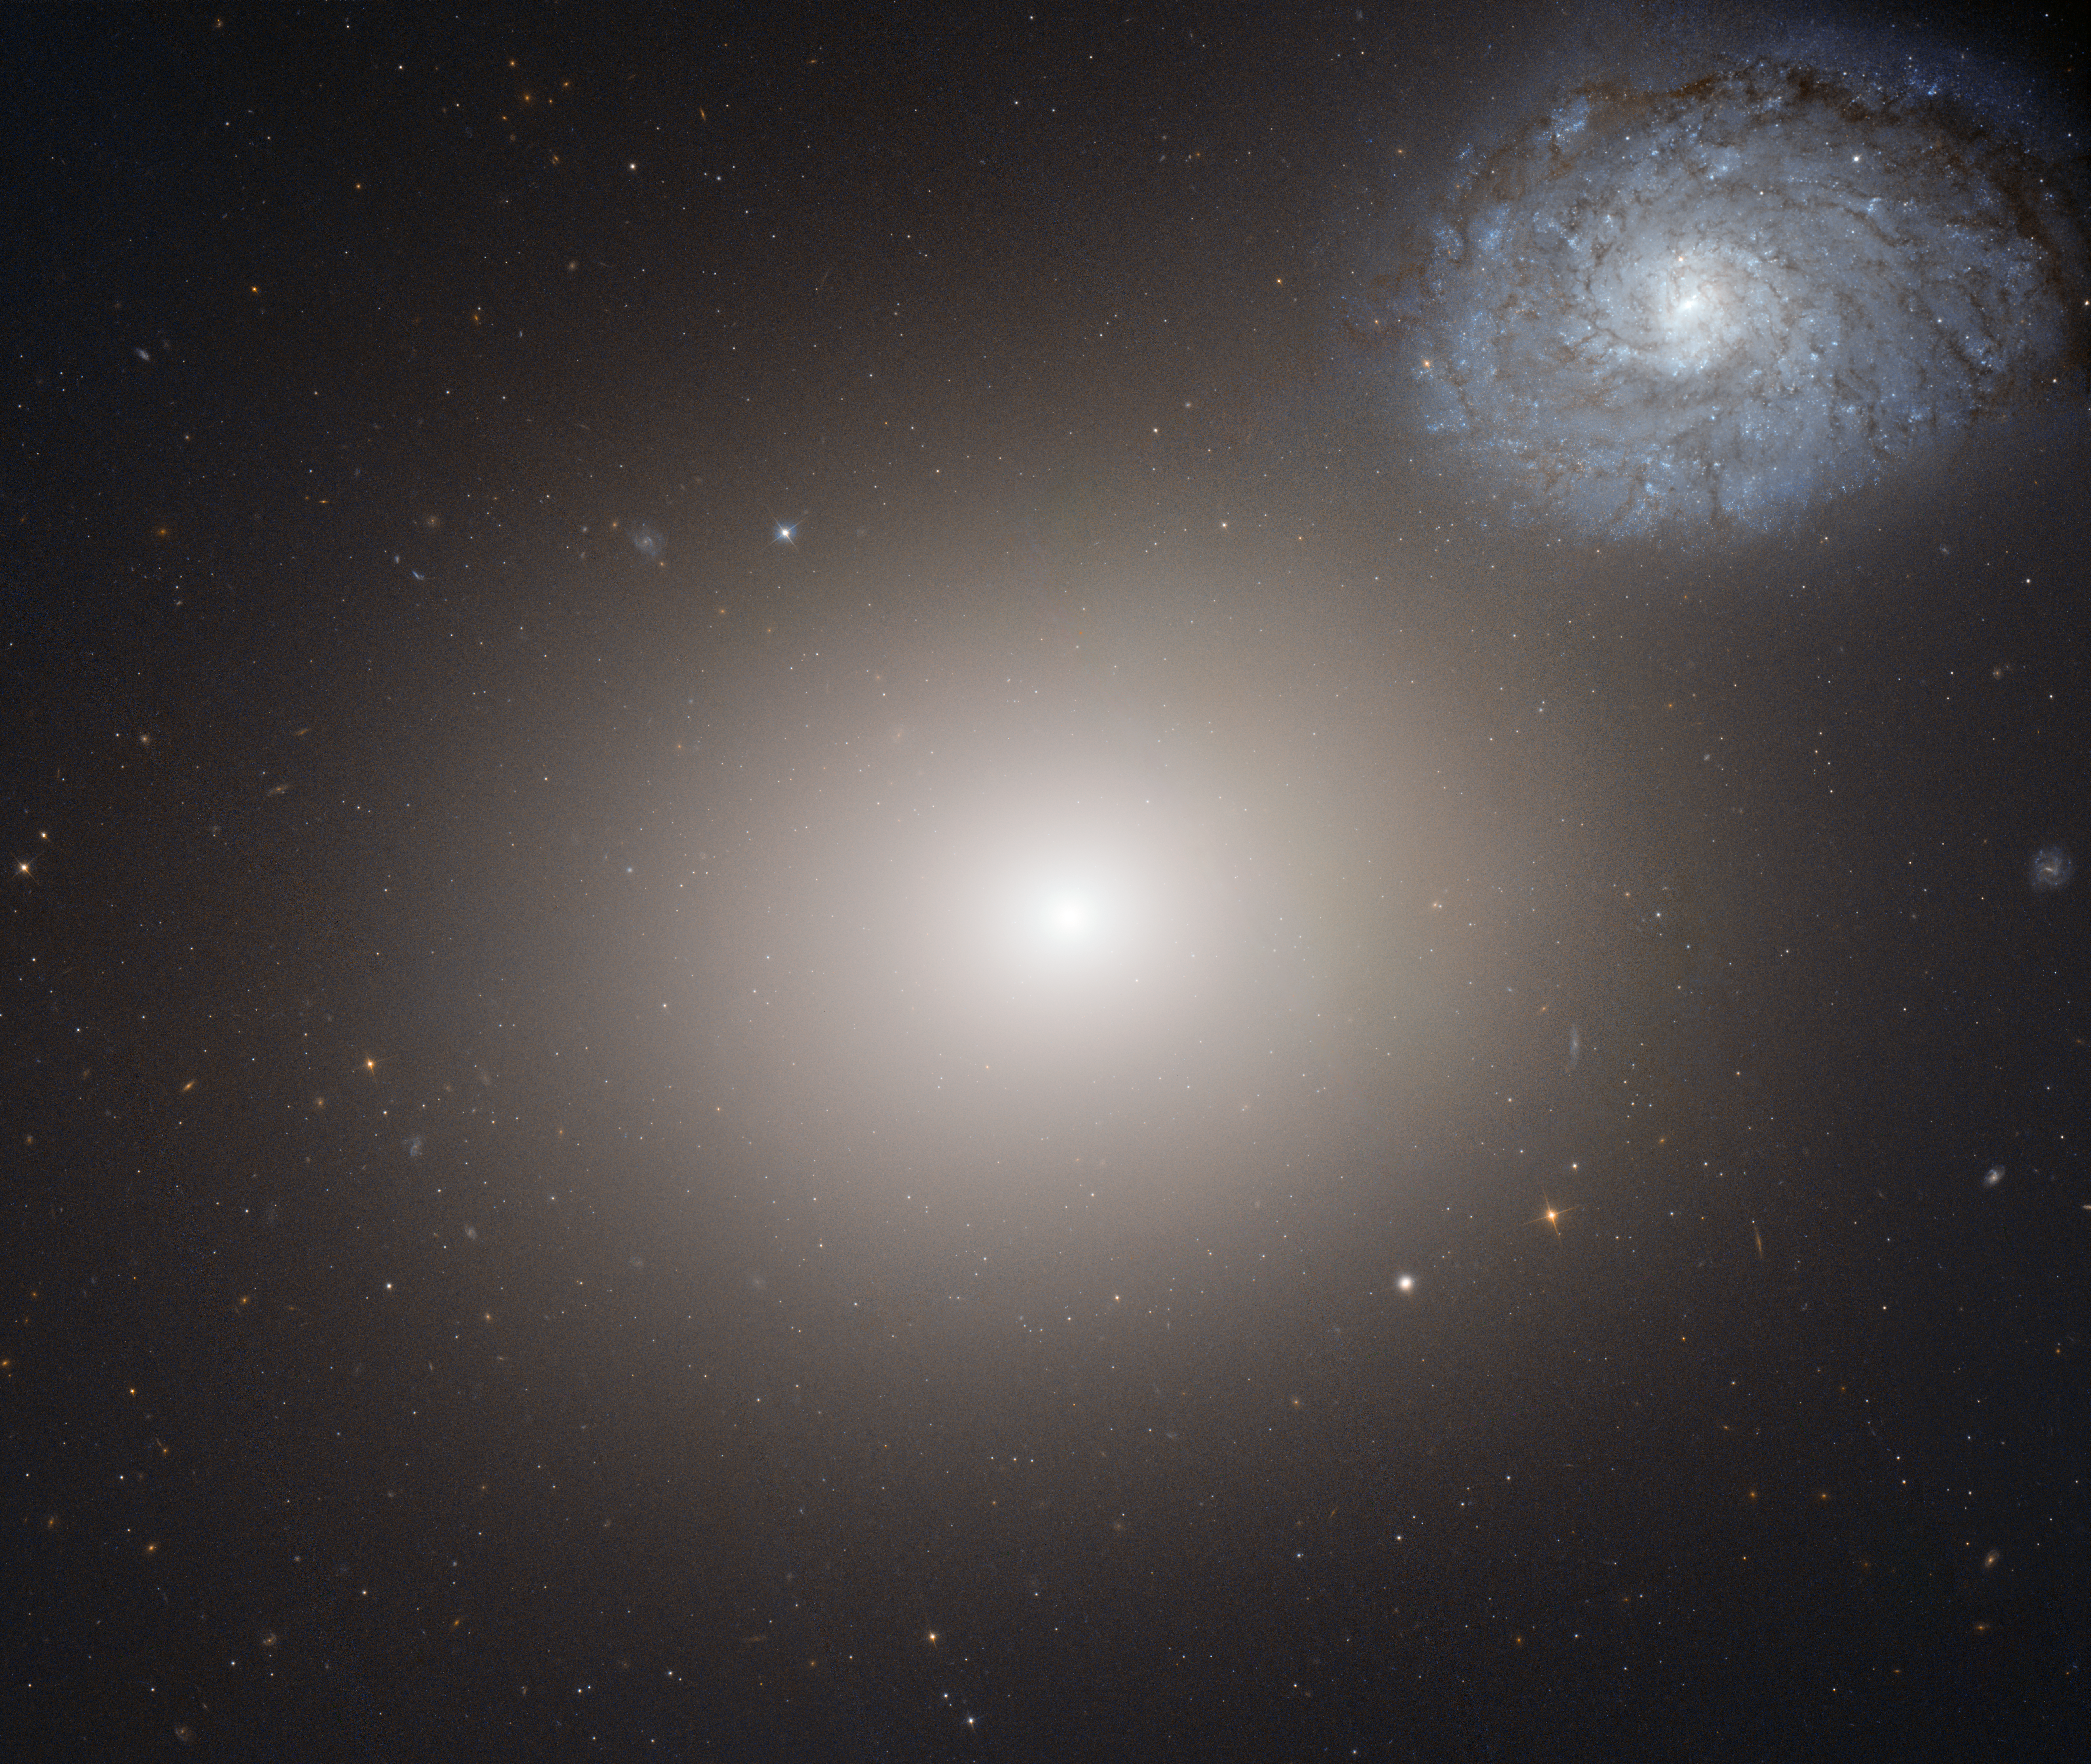

Hubble image of galaxy pair Arp 116

This NASA/ESA Hubble Space Telescope image shows the peculiar galaxy pair called Arp 116.

Arp 116 is composed of a giant elliptical galaxy known as Messier 60, and a much smaller spiral galaxy, NGC 4647.

Astronomers have long tried to determine whether these two galaxies are actually interacting. Although they overlap as seen from Earth, there is no evidence of new star formation, which would be one of the clearest signs that the two galaxies are indeed interacting. However, recent studies of very detailed Hubble images suggest the onset of some tidal interaction between the two.

Also included in the image, just below and to the right of M60, is their even smaller neighbour M60-UCD1.

M60-UCD1 is a very tiny galaxy, just 1/500th of the diameter of our Milky Way, that lies about 50 million light-years away. Despite its size, it is pretty crowded, with about 140 million stars crammed into its diameter of just 300 light-years.

An international team of astronomers have found a supermassive black hole at the centre of M60-UCD1 with the mass of 20 million Suns.

Credit: NASA, ESA